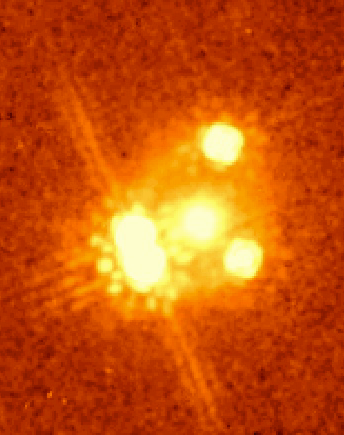

Gravitational Lens and Quasar PG1115+080

The light from the single quasar PG 1115+080 is split and distorted in this infrared image. PG 1115+080 is at a distance of about 8 billion light years in the constellation Leo, and it is viewed through an elliptical galaxy lens at a distance of 3 billion light years. The NICMOS frame is taken at a wavelength of 1.6 microns and it shows the four images of the quasar (the two on the left are nearly merging) surrounding the galaxy that causes the light to be lensed. The quasar is a variable light source and the light in each image travels a different path to reach the Earth. The time delay of the variations allows the distance scale to be measured directly. The linear streaks on the image are diffraction artifacts in the NICMOS instrument (NASA/Space Telescope Science Institute).

Credit: Christopher D. Impey (University of Arizona)